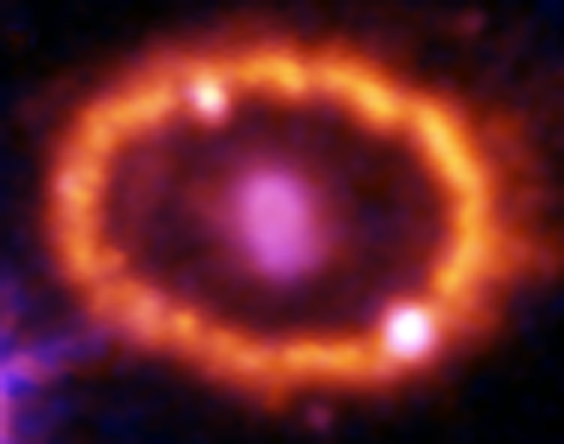

Hubble Supernova 1987A Scrapbook (1994-2003) - Image 6

in 1987, astronomers spotted the brightest stellar explosion ever seen since the one observed by Johannes Kepler over 400 years ago. Called SN 1987A, the titanic supernova explosion blazed with the power of 100,000,000 suns for several months following its discovery on Feb. 23 of that year. Although the supernova itself is over a million times fainter than when it was first discovered, a new light show in the space surrounding it is just beginning.

Credit: NASA/ESA, P. Challis, R. Kirshner (Harvard-Smithsonian Center for Astrophysics) and B. Sugerman (STScI)